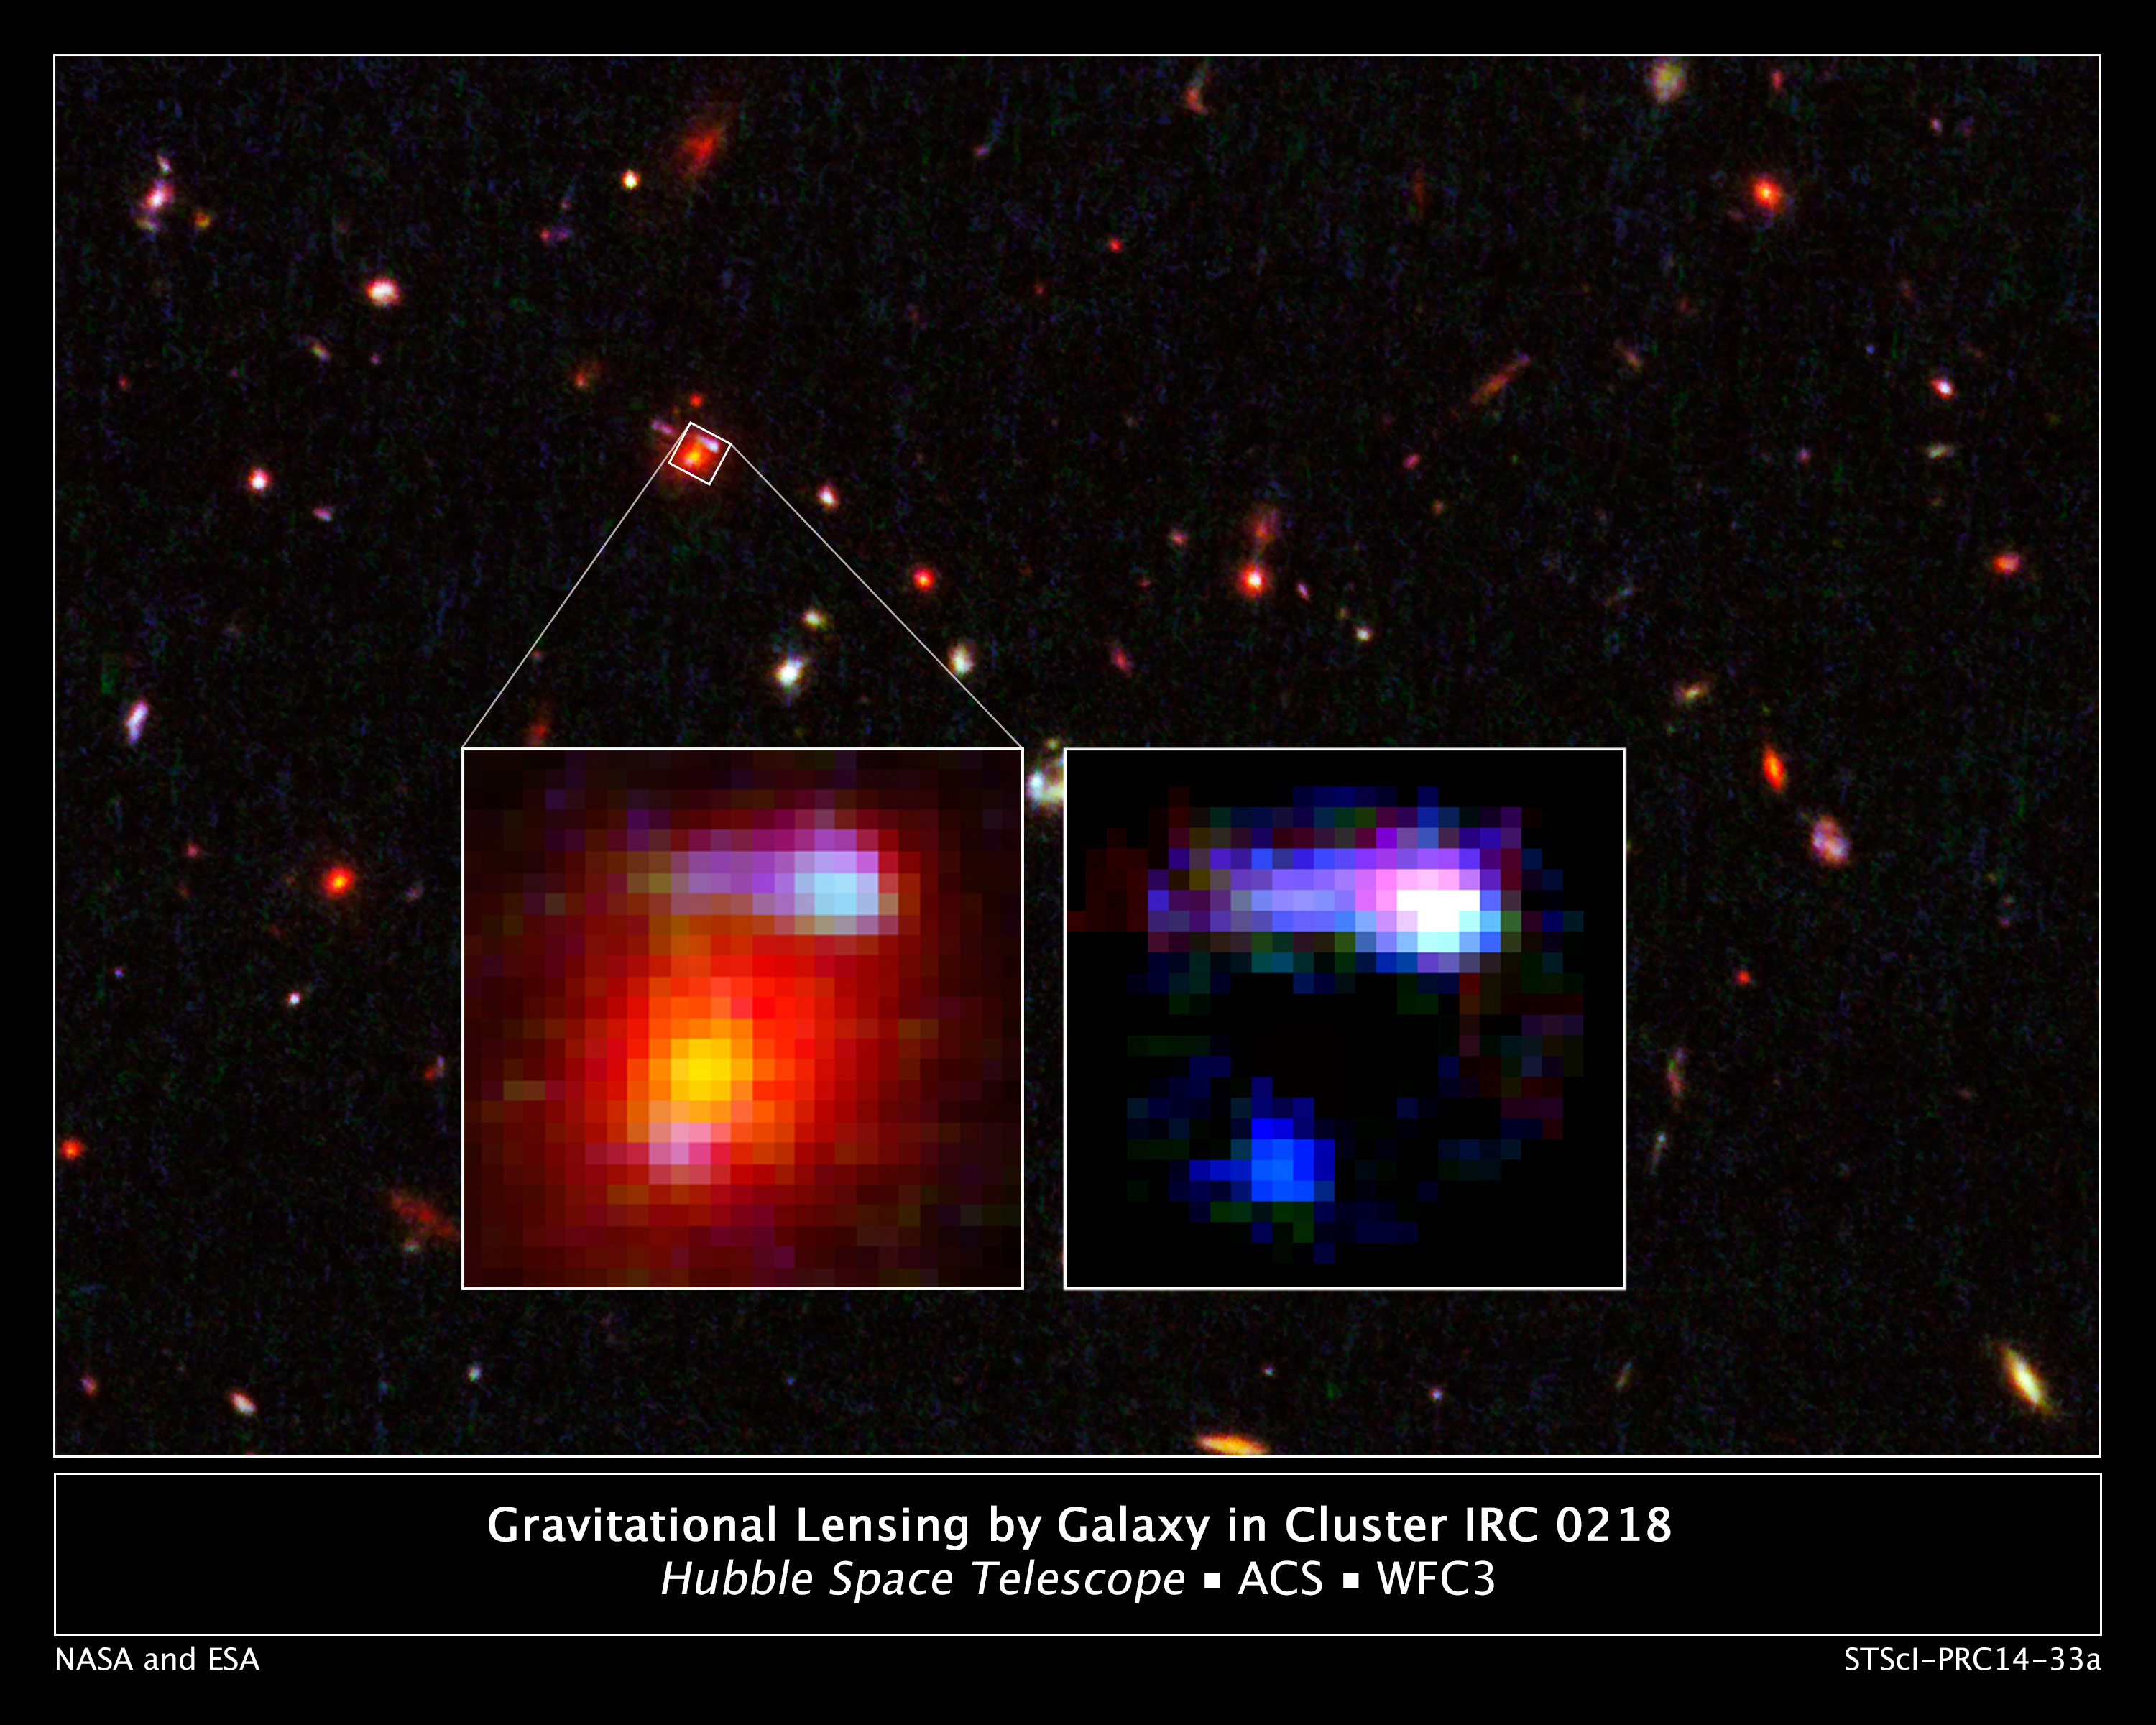

Gravitational lensing by galaxy in cluster IRC 0218, annotated

These NASA/ESA Hubble Space Telescope images reveal the most distant cosmic lens yet found, a massive elliptical galaxy whose powerful gravity is magnifying the light from a faraway galaxy behind it.

The giant elliptical is the red object in the small white square. The galaxy is seen as it appeared 9.6 billion years ago and is one of the brightest members in a distant cluster of galaxies, called IRC 0218. The background image shows the entire region surrounding the galaxy.

In the enlarged view on the left, the lighter-coloured blobs in the upper right and lower left are the distorted and magnified shapes of a more distant spiral galaxy behind the foreground elliptical. The giant elliptical is so massive that its enormous gravitational field deflects light passing through it, much as an optical lens bends light to form an image. This phenomenon, called gravitational lensing, magnifies, brightens, and distorts images from faraway objects that might otherwise be too faint to observe even with the largest telescopes.

Astronomers needed spectroscopy to determine that the blobby features were two images of the same distant galaxy. In the enlarged view on the right, astronomers have subtracted the image of the giant red elliptical to show the more distant spiral galaxy. The glow of young stars makes the galaxy appear blue. The white area at upper right is probably a region of star formation.

The images were made by combining visible-light observations from the Advanced Camera for Surveys and near-infrared exposures from the Wide Field Camera 3.

Credit: NASA, ESA, K.-V. Tran (Texas A&M University), and K. Wong (Academia Sinica Institute of Astronomy & Astrophysics)